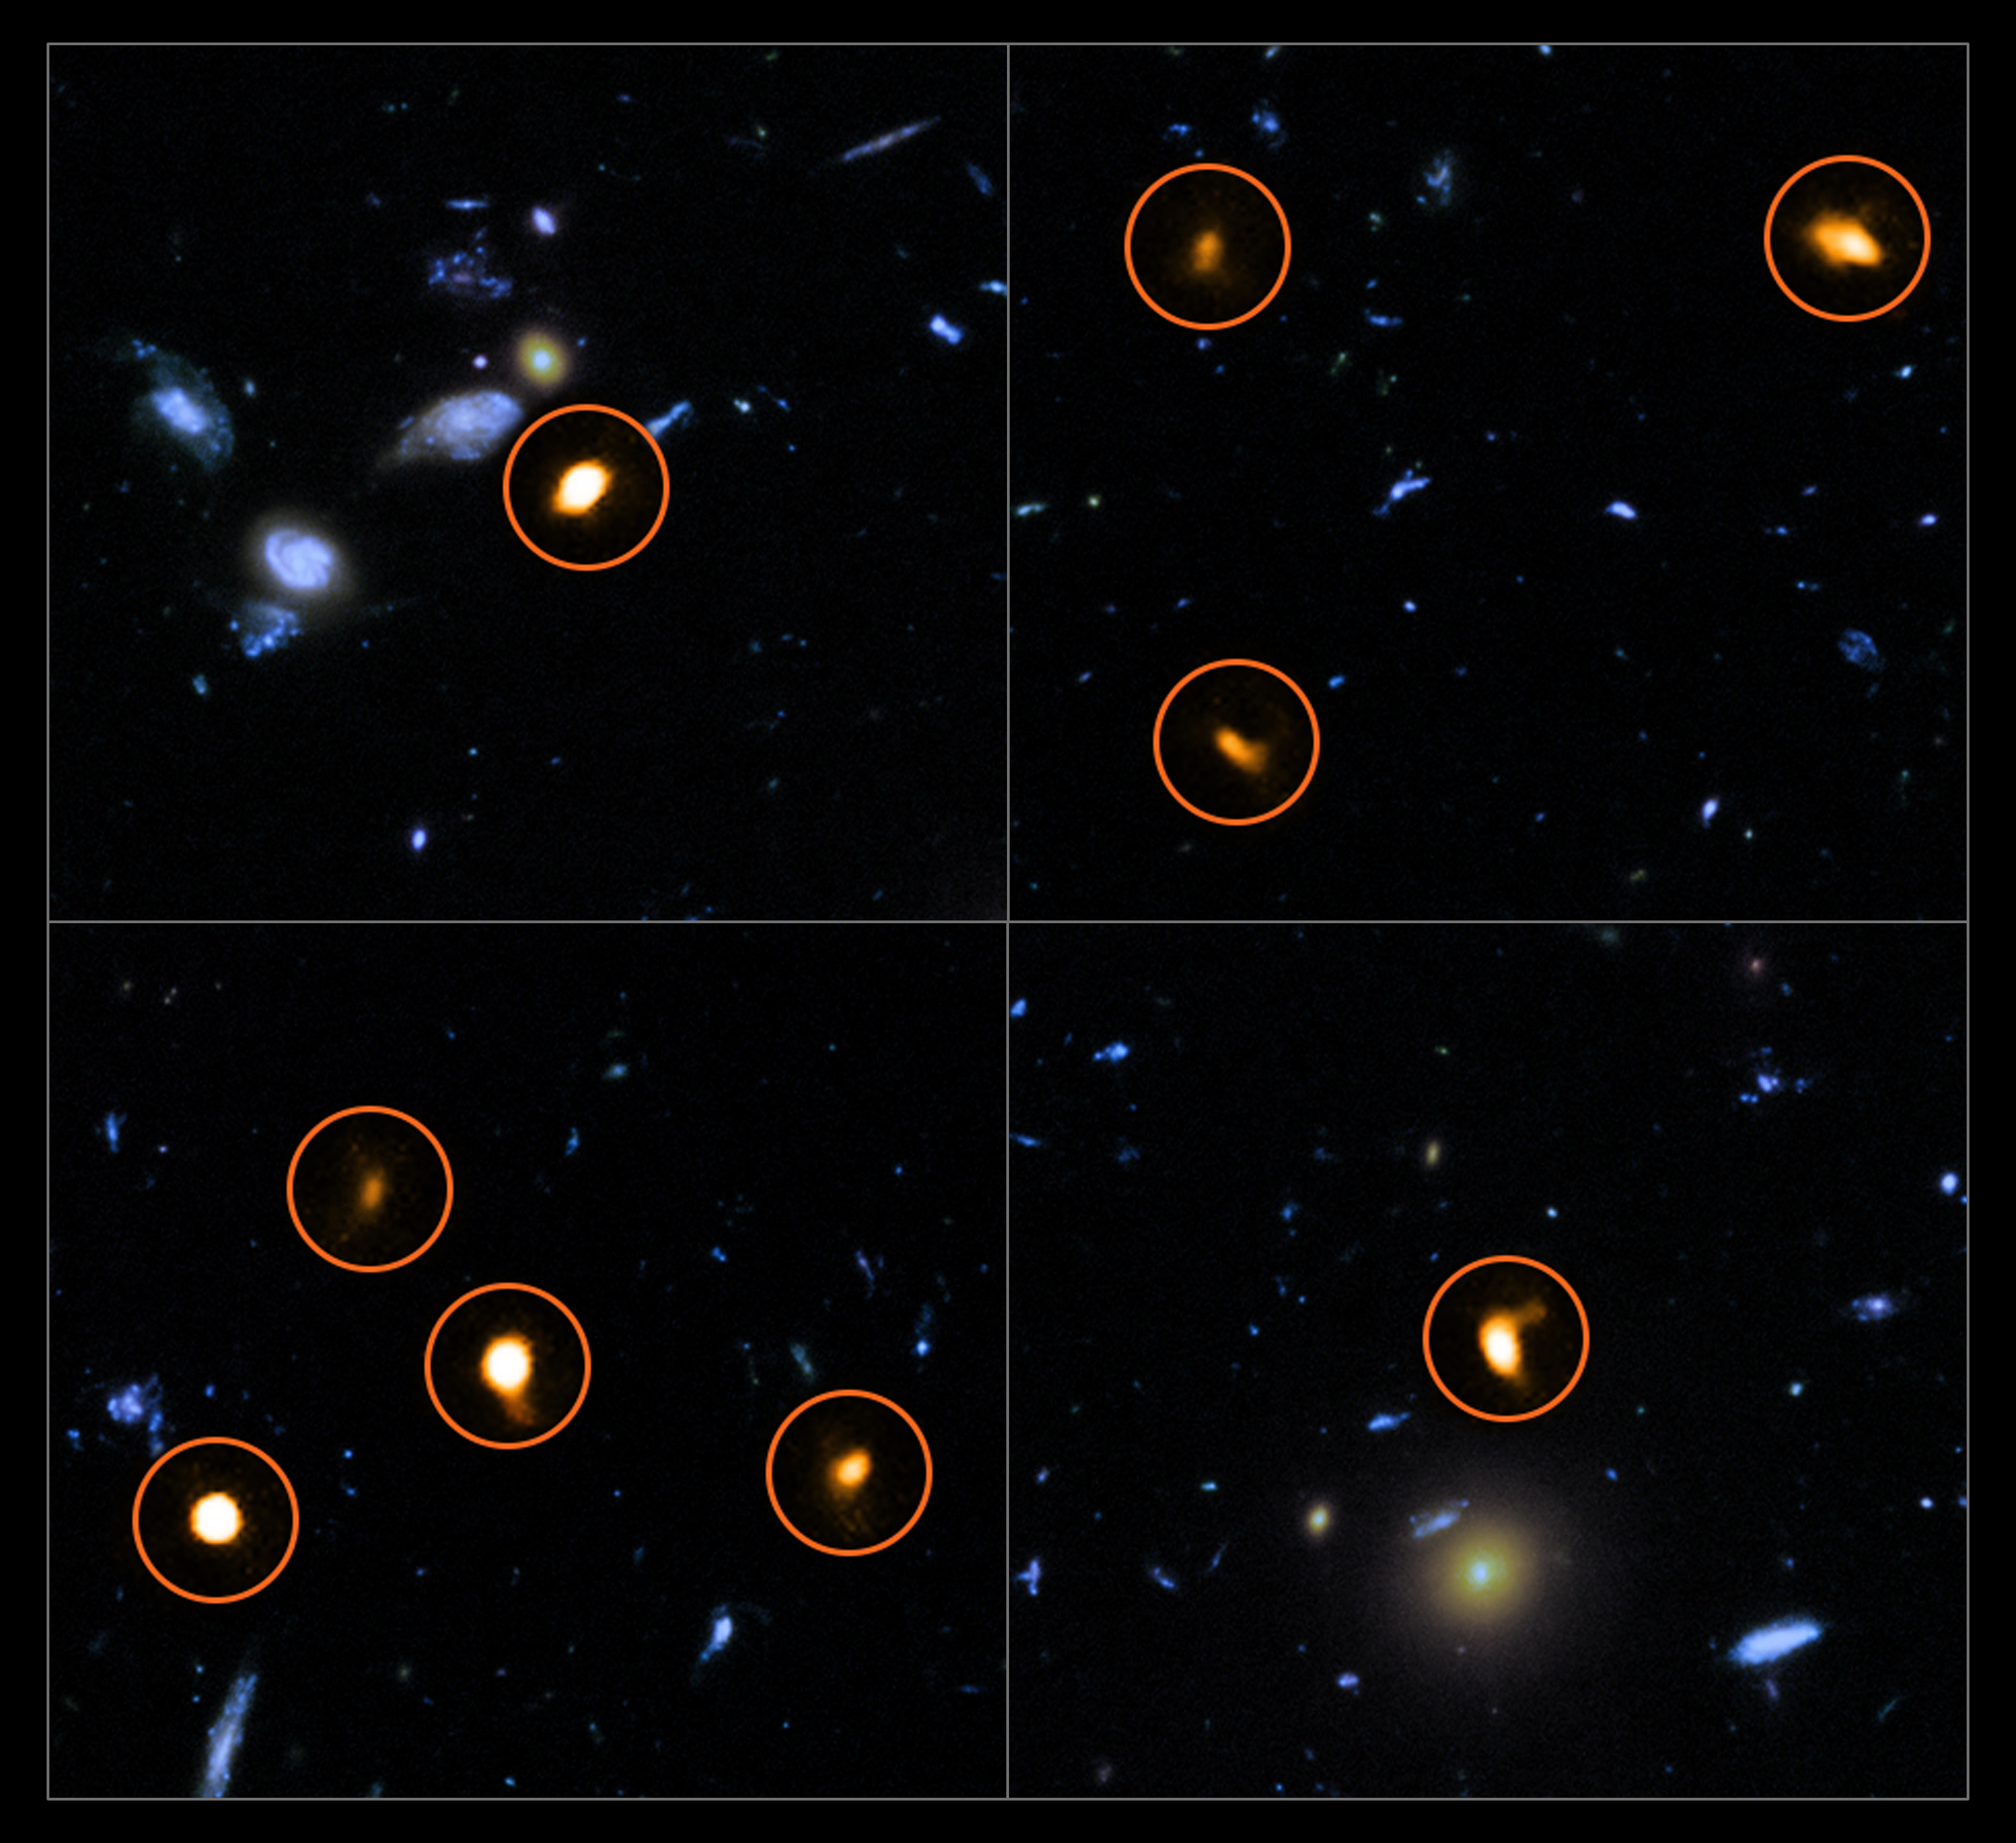

ALMA probes the Hubble Ultra Deep Field

These cutout images are from a combination of a background picture taken by the NASA/ESA Hubble Space Telescope (blue/green) with a new very deep view of the field (orange, marked with circles) by the Atacama Large Millimeter/submillimeter Array (ALMA). All the objects that ALMA sees appear to be massive star-forming galaxies.

This image is based on the ALMA survey by J. Dunlop and colleagues, covering the full Hubble Ultra Deep Field area.

Credit: ALMA (ESO/NAOJ/NRAO)/NASA/ESA/J. Dunlop et al. and S. Beckwith (STScI) and the HUDF Team.